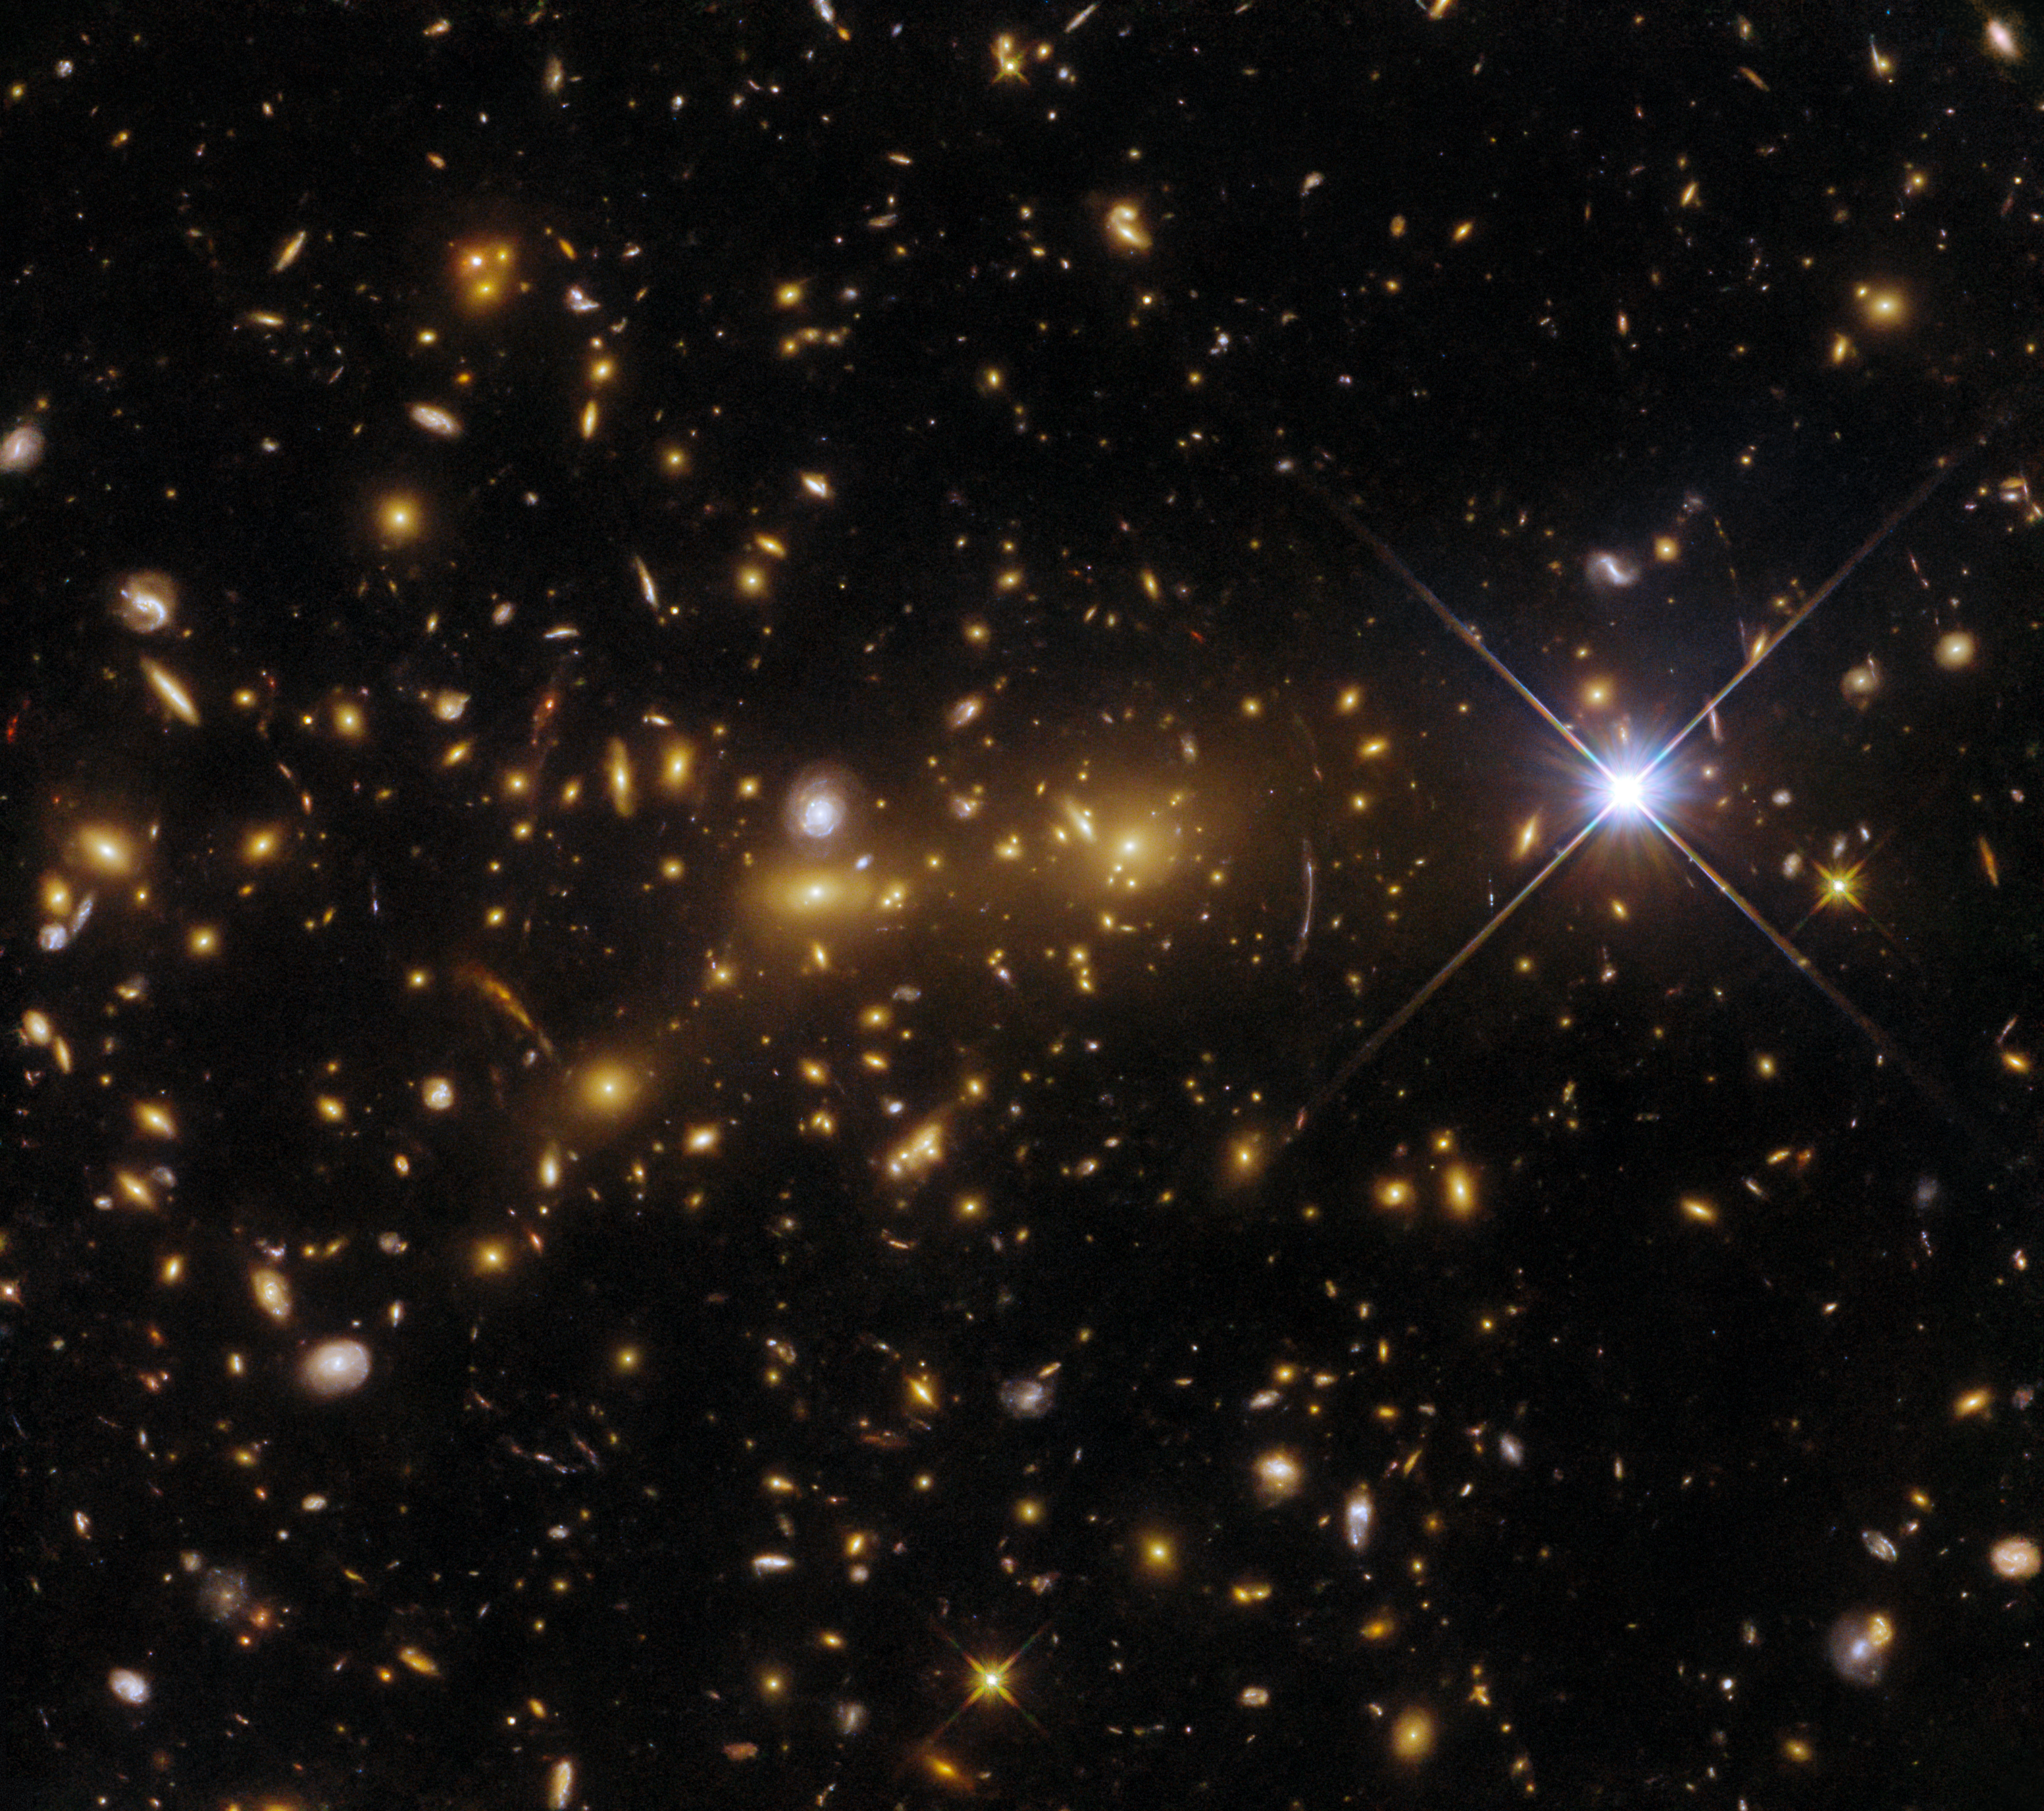

Galactic monster mash

The NASA/ESA Hubble Space Telescope has captured a monster in the making in this observation of the exceptional galaxy cluster eMACS J1353.7+4329, which lies about eight billion light-years from Earth in the constellation Canes Venatici. This disturbed collection of at least two galaxy clusters is in the process of merging together to create a cosmic monster, a single gargantuan cluster acting as a gravitational lens.

Gravitational lensing is a dramatic example of Einstein’s general theory of relativity in action. A celestial body such as a galaxy cluster is sufficiently massive to distort spacetime, which causes the path of light around the object to be visibly bent as if by a vast lens. Gravitational lensing can also magnify distant objects, allowing astronomers to observe objects that would otherwise be too faint and too far away to be detected. It can also distort the images of background galaxies, turning them into streaks of light. The first hints of gravitational lensing are already visible in this image as bright arcs which mingle with the throng of galaxies in eMACS J1353.7+4329.

The data in this image are drawn from an observing proposal called Monsters in the Making, which used two of Hubble’s instruments to observe five exceptional galaxy clusters at multiple wavelengths. These multi-wavelength observations were made possible by Hubble’s Wide Field Camera 3 and Advanced Camera for Surveys. The astronomers behind these observations hope to lay the groundwork for future studies of vast gravitational lenses with next-generation telescopes such as the NASA/ESA/CSA James Webb Space Telescope.

Credit: ESA/Hubble & NASA, H. Ebeling